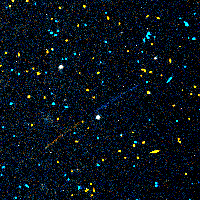

Serendipitously discovered asteroids

This asteroid in the constellation Taurus has a visual magnitude of 23, and is one of the faintest seen so far in the Hubble archive

Credit: R. Evans and K. Stapelfeldt (Jet Propulsion Laboratory) and NASA/ESA